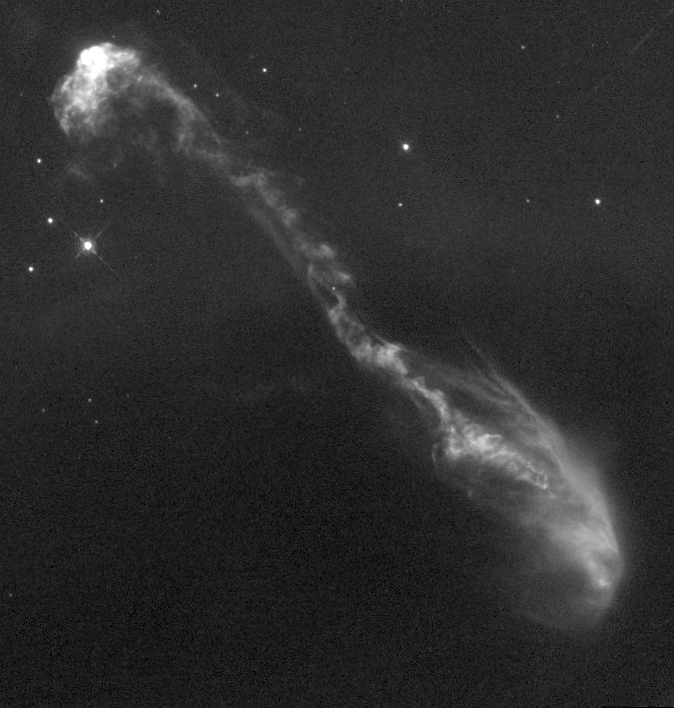

Jets from Young Stars (HH-47)

Resembling the vertebrae of an imaginary space alien, this one-half light-year long jet of gas has burst out of a dark cloud of gas and dust which hides the newly forming star located in the lower left corner of the image.

Credit: J. Morse (STScI), and NASA/ESA Co-investigators: B. Reipurth (European Southern Observ.), S. Heathcote (Cerro Tololo Inter-American Observ.), P. Hartigan (Rice Univ.), J. Bally (Univ. of Colorado), R. Schwartz (Univ. of Missouri), J. Stone (Univ. of Maryland)